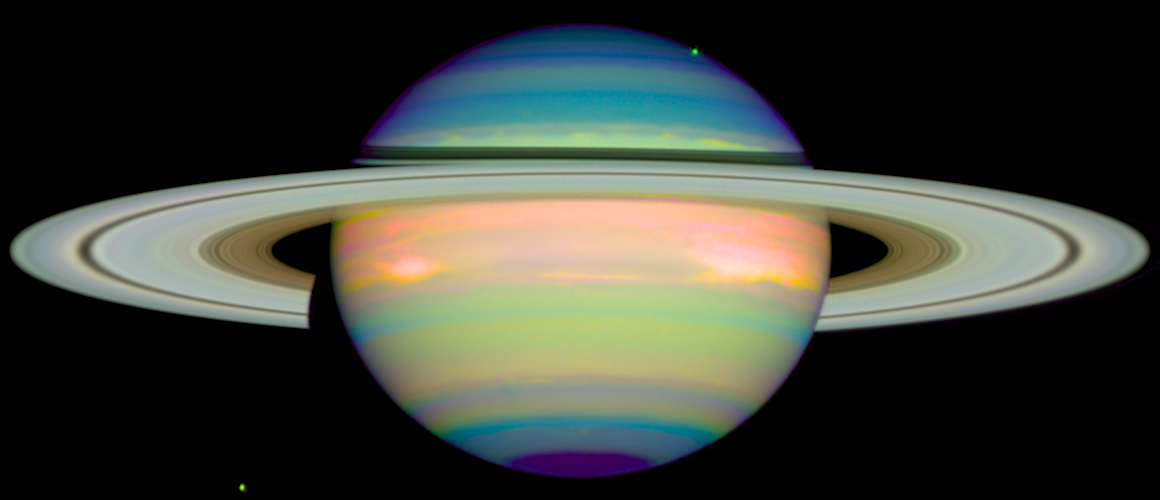

An infrared view of Saturn

In honor of the NASA/ESA Hubble Space Telescope's eighth anniversary, we have gift wrapped Saturn in vivid colours. Actually, this image is courtesy of the new Near Infrared Camera and Multi-Object Spectrometer (NICMOS), which has taken its first peek at Saturn. The false-color image - taken Jan. 4, 1998 - shows the planet's reflected infrared light. This view provides detailed information on the clouds and hazes in Saturn's atmosphere.

This false-colour image of Saturn, taken with Hubble's Near Infrared Camera and Multi-Object Spectrometer (NICMOS), shows the planet's reflected infrared light. This view provides detailed information on the clouds and hazes in Saturn's atmosphere. The blue colours indicate a clear atmosphere down to a main cloud layer. Different shadings of blue indicate variations in the cloud particles, in size or chemical composition. The cloud particles are believed to be ammonia ice crystals. Most of the northern hemisphere that is visible above the rings is relatively clear. The dark region around the south pole at the bottom indicates a big hole in the main cloud layer. The green and yellow colours indicate a haze above the main cloud layer. The haze is thin where the colours are green but thick where they are yellow. Most of the southern hemisphere (the lower part of Saturn) is quite hazy. These layers are aligned with latitude lines, due to Saturn's east-west winds. The red and orange colours indicate clouds reaching up high into the atmosphere. Red clouds are even higher than orange clouds. The densest regions of two storms near Saturn's equator appear white.

Credit: Erich Karkoschka (University of Arizona), and NASA/ESA